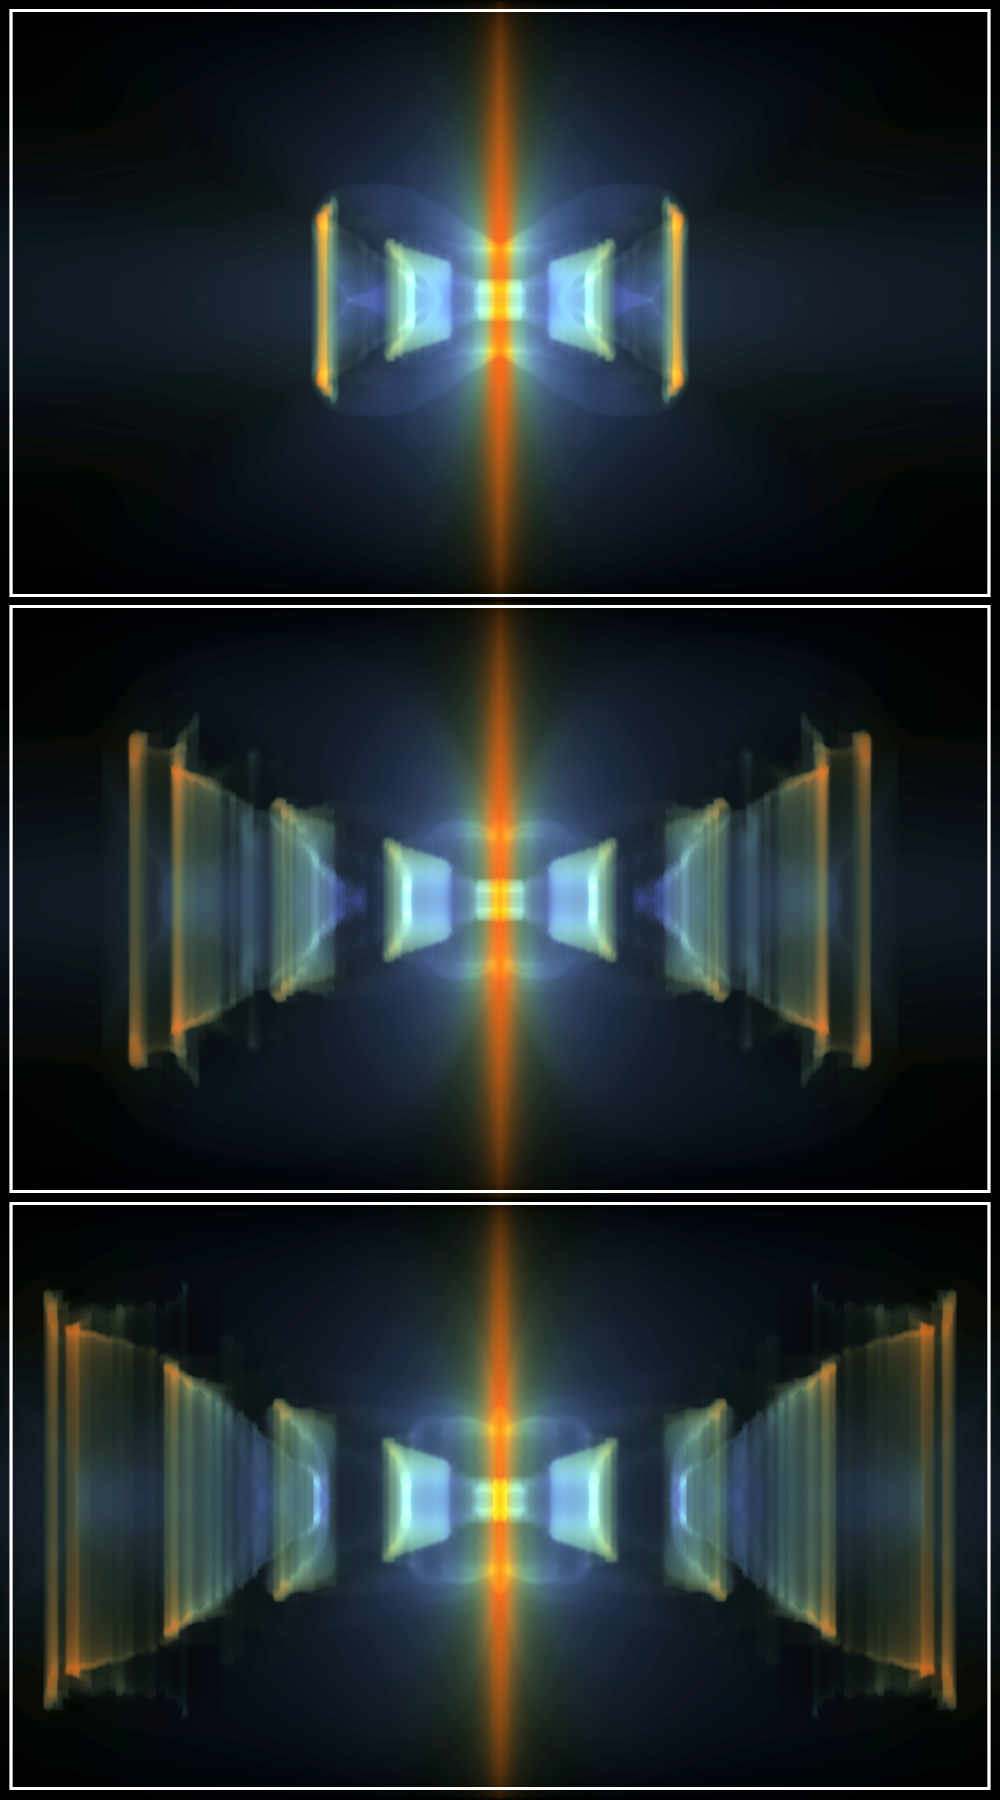

Simulating the red rectangle

The NASA/ESA Hubble Space Telescope has revealed a wealth of new features in the Red Rectangle that cannot be seen with ground-based telescopes looking through the Earth's turbulent atmosphere. Whereas the origins of many of the features in this dying star still remain hidden, some are well explained by theorists like the Dutch scientist Vincent Icke from Leiden University in the Netherlands.

In 1981 Vincent Icke and collaborators showed that a spherical gas ejection from a dying star hitting a dust torus would give rise to shocks that can produce cone-like outflows similar to the two cones seen in the Hubble image.

Meteorologists produce weather forecasts by advanced calculations of temperatures, pressures, velocities and densities for the air masses in our atmosphere and, to some degree, theorists like Icke are doing exactly the same for objects in space. Whether modelling the weather in Earth's atmosphere or the processes in distant gaseous nebulae, scientists calculate the motion of the gas by using a complicated set of expressions known as hydrodynamic equations. This is a very demanding process, possible only on fast computers using sophisticated computer models.

Most of the matter in the Universe is in the form of gas. The weather on Earth gives rise to spectacular patterns such as thunderclouds and tornadoes in the air masses here. Likewise, the "weather" in gas clouds in space, like the Red Rectangle, can be fascinating.

Weather prediction here on Earth is difficult enough, but in space the actual three-dimensional distribution of the gas itself is not known and there are also many local effects that may play a part in shaping the nebula, such as the distribution of the dust around the nebula and the chemistry of this dust.

Of the many different parameters in Vincent Icke's calculations, only the density of the gas and the dust are observed in the Hubble image. The reflection of the gas and dust are shown in this simulated image. The colours show what one would see in scattered light. Blue light scatters more than red (the same process that makes the sky blue and sunsets red here on Earth). The ejected blobs of gas and dust look reddish, the background nebula is whiter. The three images are a time sequence with about 600 years between and show how the Red Rectangle may have been created. Image number 3 shows a state similar to how we observe the Red Rectangle with Hubble.

Credit: ESA and Vincent Icke (Leiden University, the Netherlands)